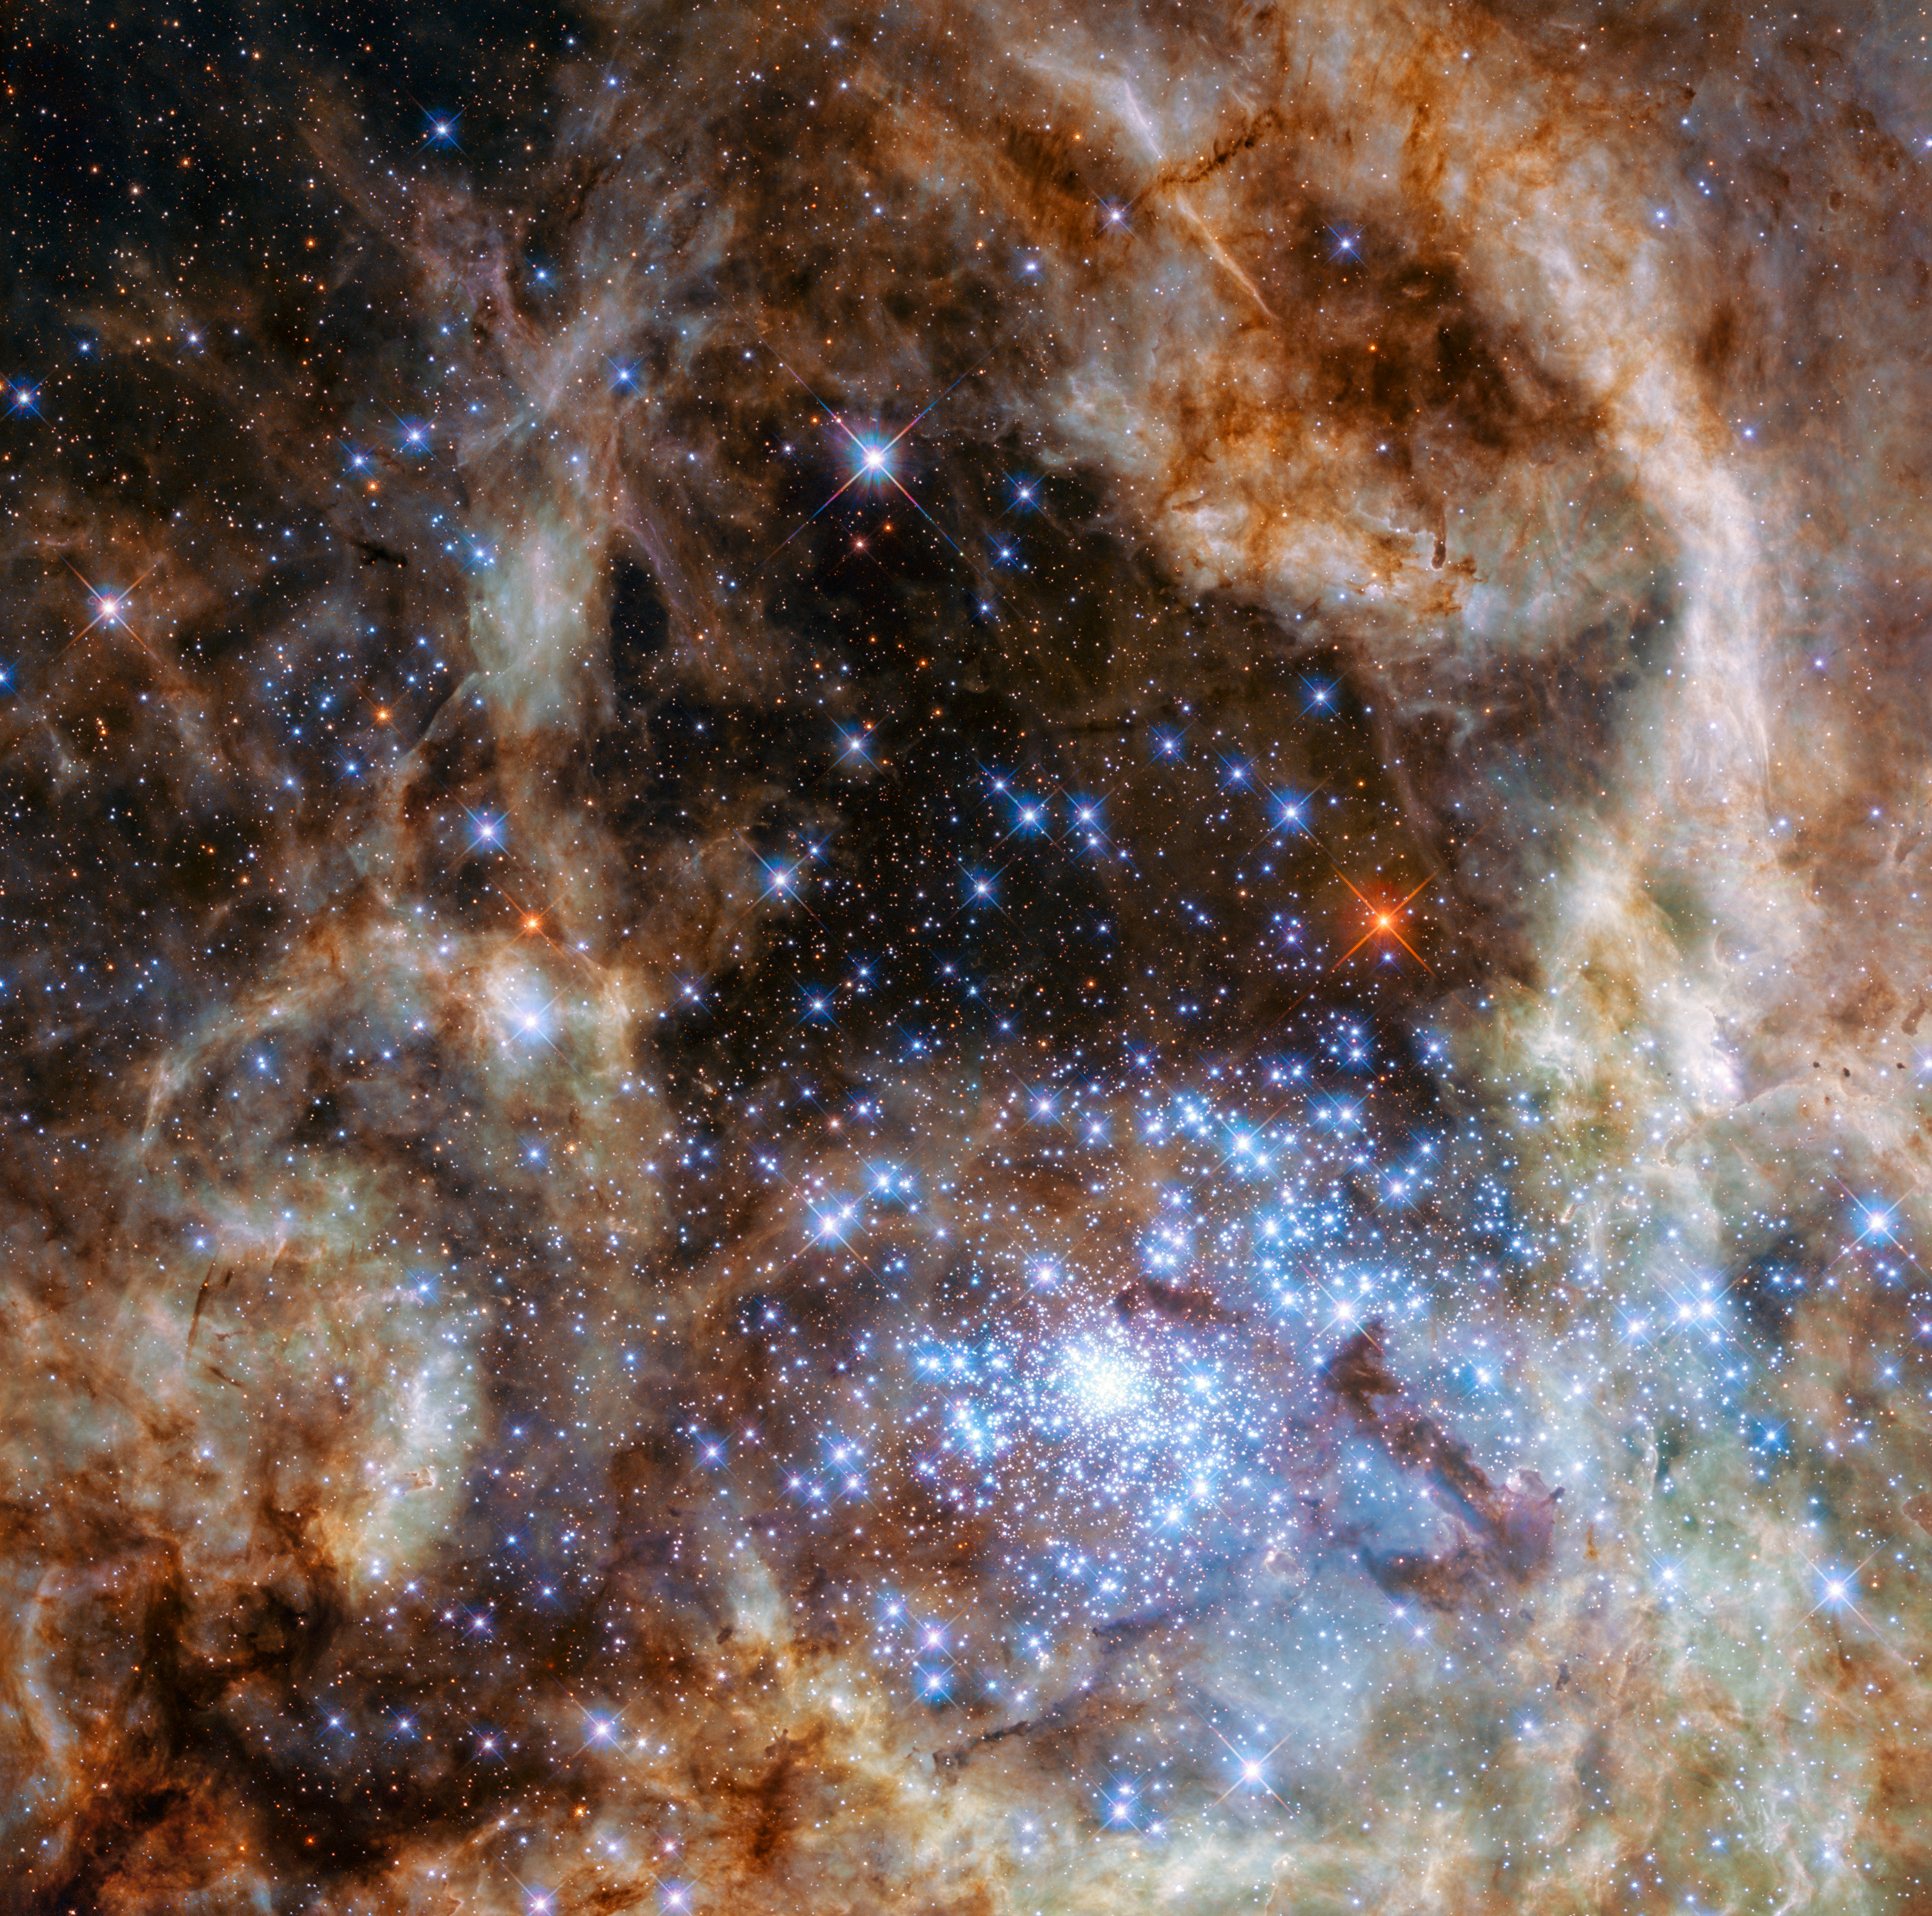

R136 observed with WFC3

The image shows the central region of the Tarantula Nebula in the Large Magellanic Cloud. The young and dense star cluster R136 can be seen at the lower right of the image. This cluster contains hundreds of young blue stars, among them the most massive star detected in the Universe so far.

Using the NASA/ESA Hubble Space Telescope astronomers were able to study the central and most dense region of this cluster in detail. Here they found nine stars with more than 100 solar masses.

Credit: NASA, ESA, P Crowther (University of Sheffield)